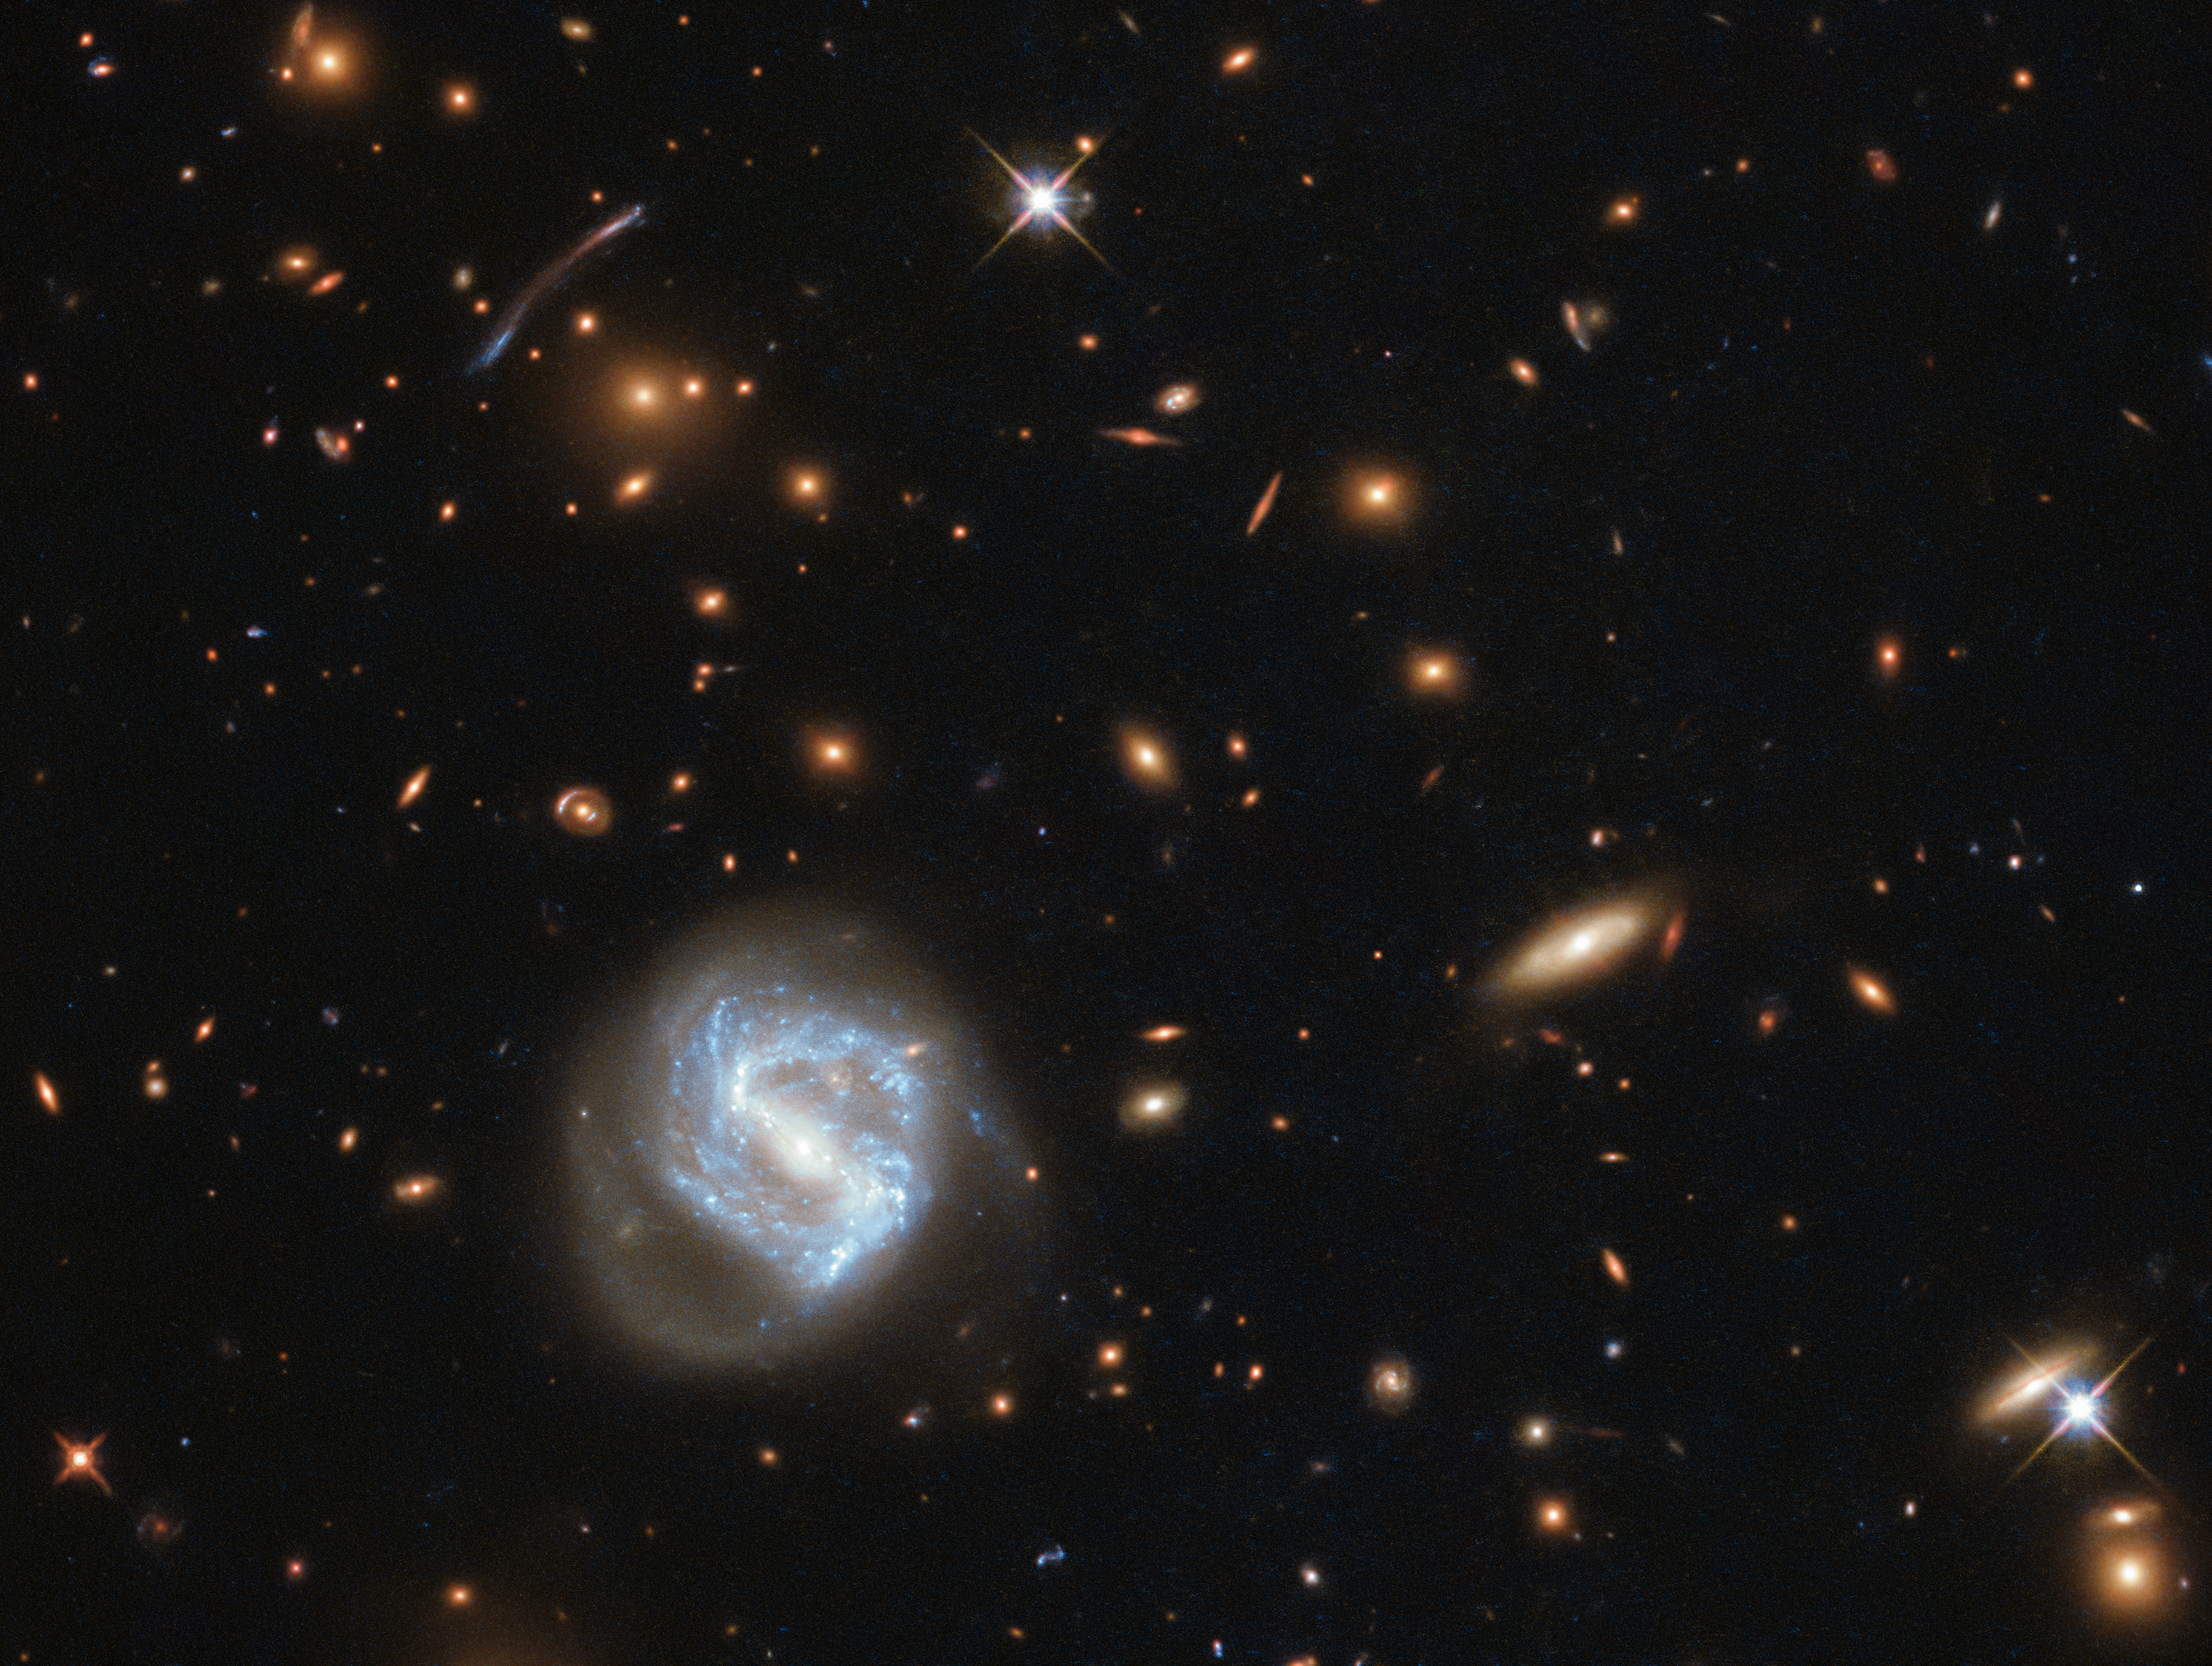

Between Local and Laniakea

At first glance, this image is dominated by the vibrant glow of the swirling spiral to the lower left of the frame. However, this galaxy is far from the most interesting spectacle here — behind it sits a galaxy cluster.

Galaxies are not randomly distributed in space; they swarm together, gathered up by the unyielding hand of gravity, to form groups and clusters. The Milky Way is a member of the Local Group, which is part of the Virgo Cluster, which in turn is part of the 100 000-galaxy-strong Laniakea Supercluster.

The galaxy cluster seen in this image is known as SDSS J0333+0651. Clusters such as this can help astronomers understand the distant — and therefore early — Universe. SDSS J0333+0651 was imaged as part of a study of star formation in far-flung galaxies. Star-forming regions are typically not very large, stretching out for a few hundred light-years at most, so it is difficult for telescopes to resolve them at a distance. Even using its most sensitive and highest-resolution cameras, Hubble cannot resolve very distant star-forming regions, so astronomers use a cosmic trick: they search instead for galaxy clusters, which have a gravitational influence so immense that they warp the spacetime around them. This distortion acts like a lens, magnifying the light of galaxies sitting far behind the cluster and producing elongated arcs like the one seen to the left of centre in this image.

Credit: ESA/Hubble & NASA